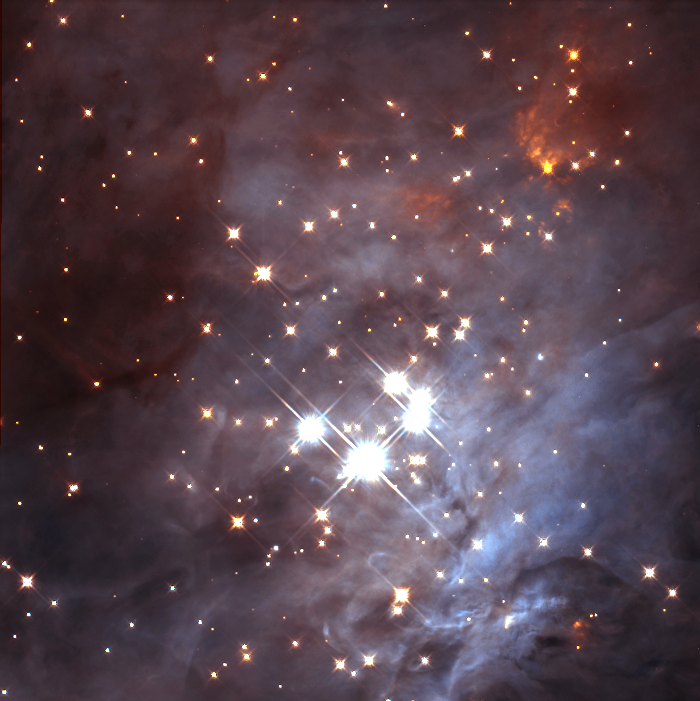

Trapezium Cluster in the Orion Nebula

Probing deep within a neighborhood stellar nursery, NASA/ESA Hubble Space Telescope uncovered a swarm of newborn brown dwarfs. The orbiting observatory's near-infrared camera revealed about 50 of these objects throughout the Orion Nebula's Trapezium cluster about 1, 500 light-years from Earth.

Credit: K.L. Luhman (Harvard-Smithsonian Center for Astrophysics, Cambridge, Mass.); and G. Schneider, E. Young, G. Rieke, A. Cotera, H. Chen, M. Rieke, R. Thompson (Steward Observatory, University of Arizona, Tucson, Ariz.) and NASA/ESA